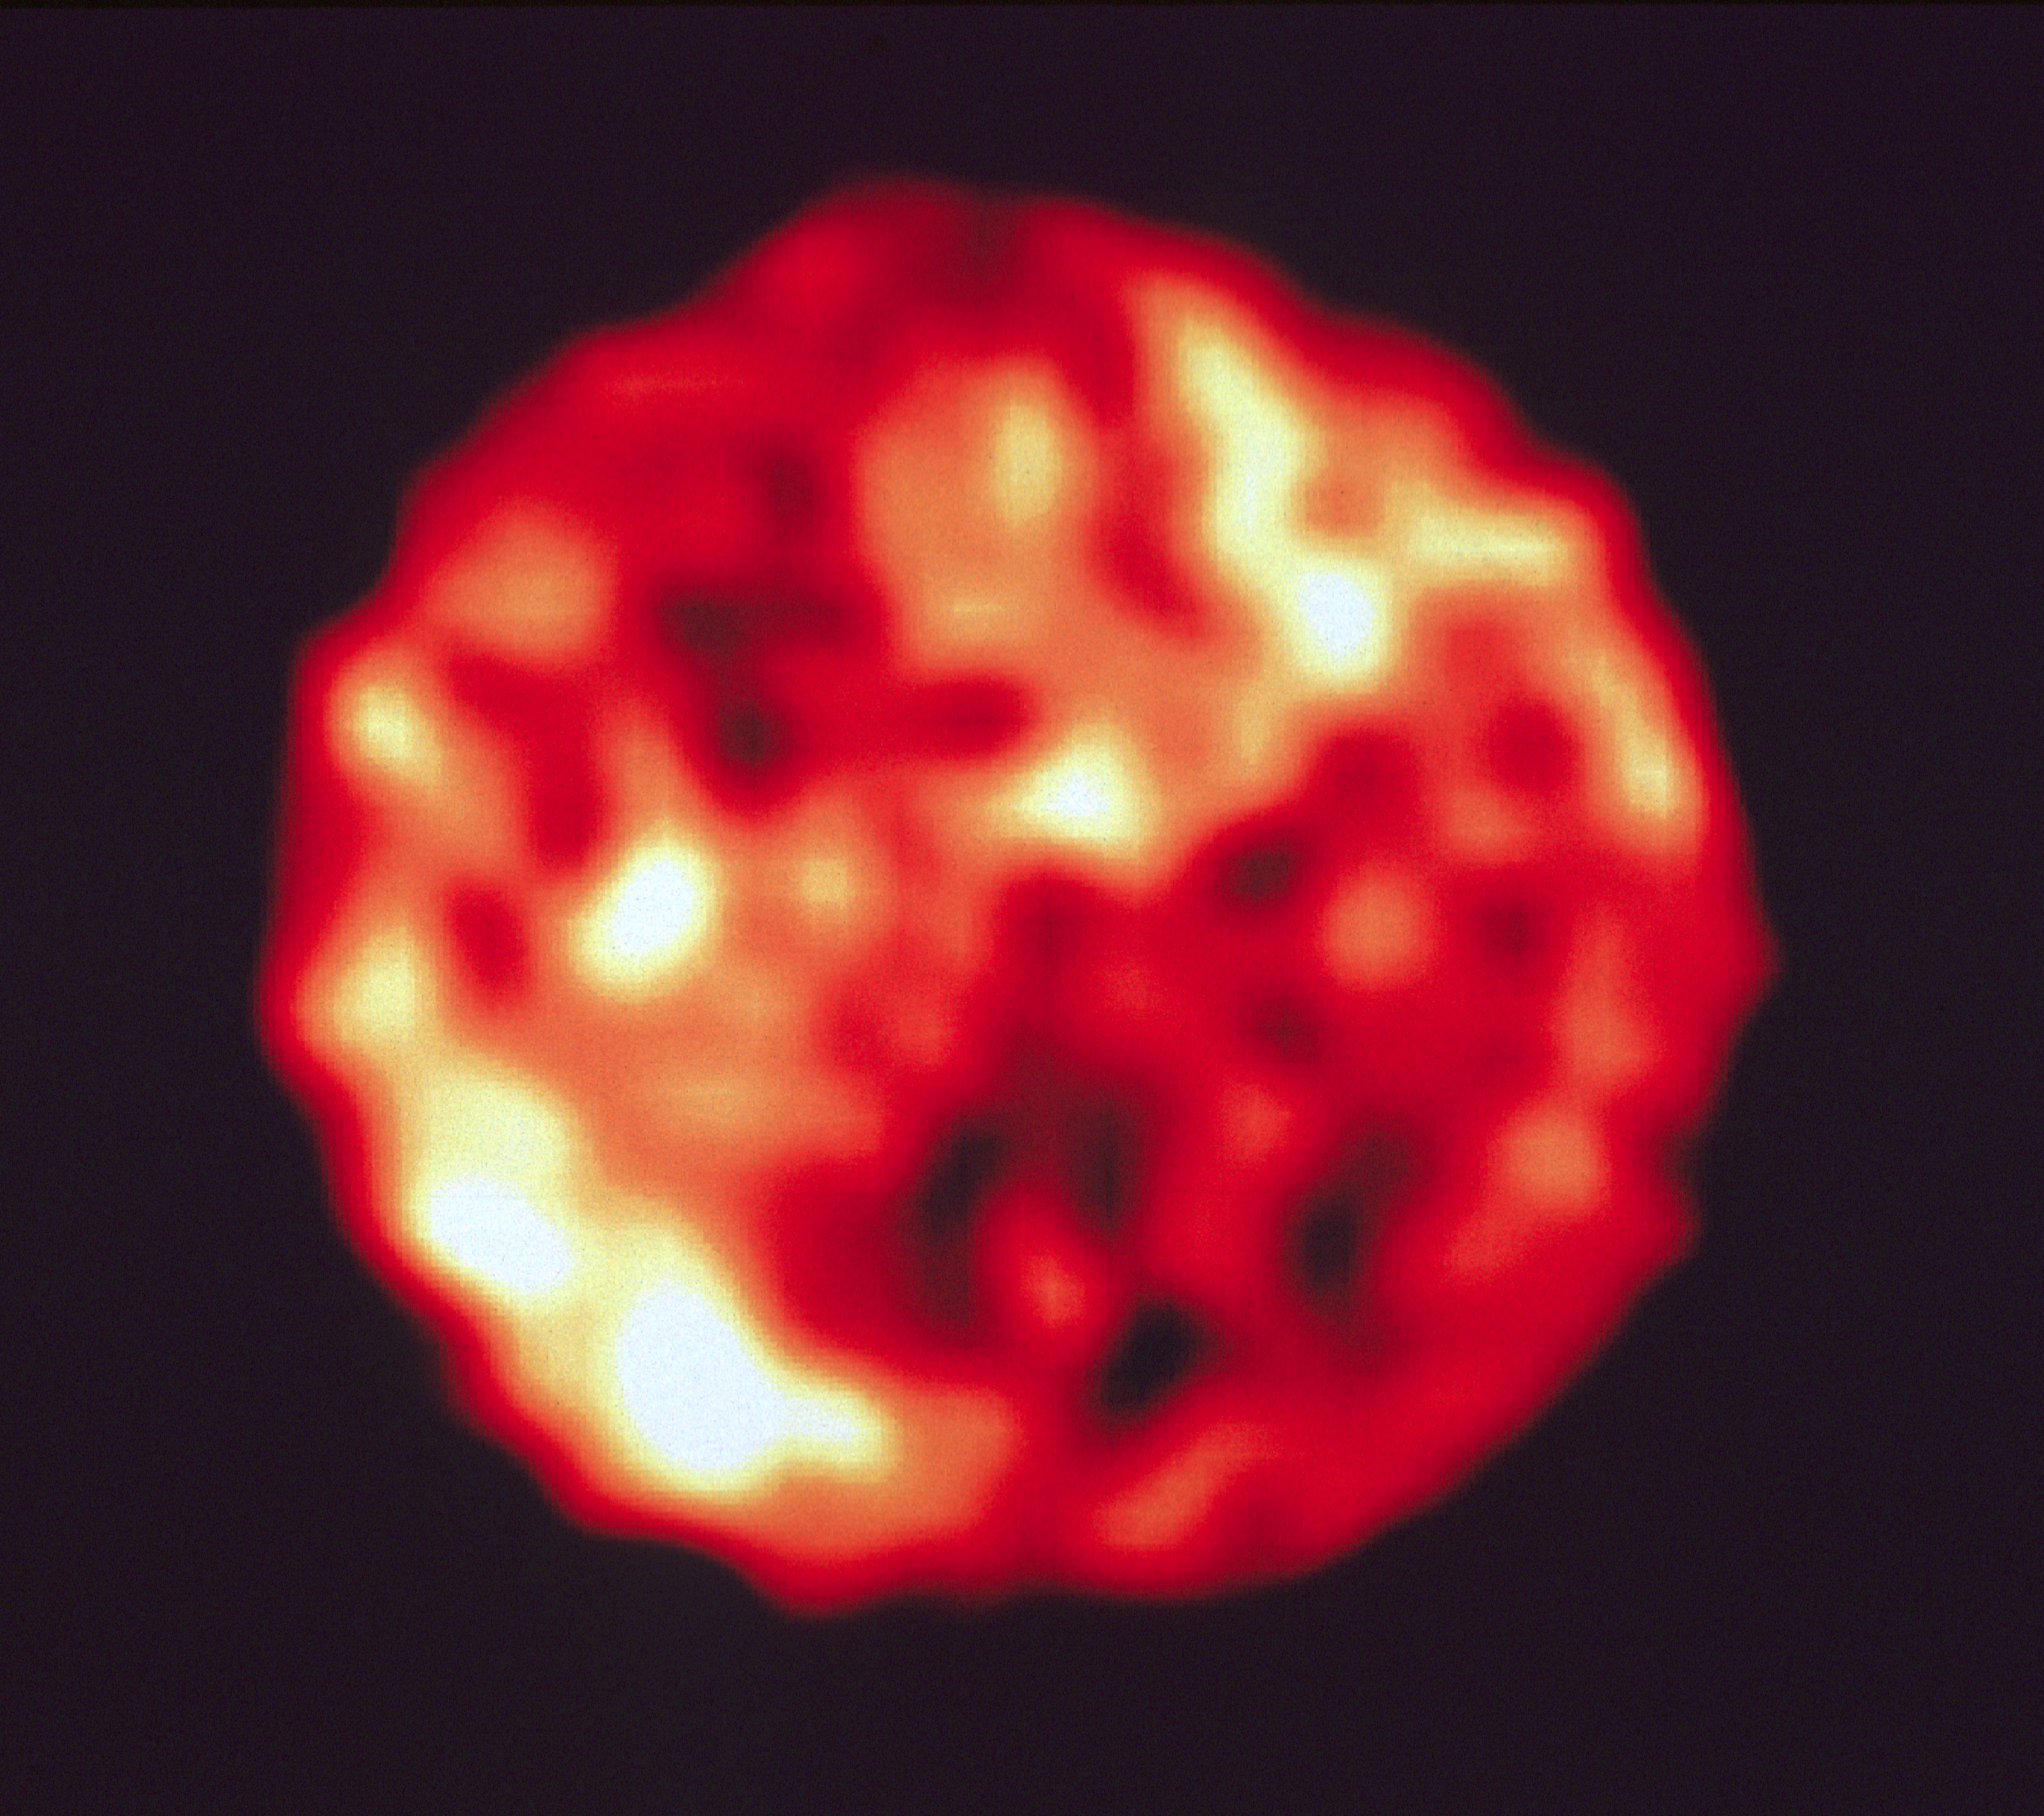

NASA Hubble Space Telescope High Resolution Uv Image of Jupiter's Satellite Io

This is a Hubble Space Telescope image of the geologically active trailing hemisphere of the Jovian moon lo. Theultraviolet light image as taken with the European Space Agency's Faint Object Camera on March 15, 1992, whenlo was 414 million miles from Earth. No larger than Earth's moon, lo is so far away it is at the resolution limit ofground-based telescopes, so surface features cannot be distinguished. HST resolves features as small as 150 miles (about 240 kilometres) across. This level of detail is only surpassed by the Voyager probes which flew within several hundred thousand milesof lo in 1979. lo's surface looks remarkably different in ultraviolet light than it does in visible light. Regions which lookbright in visible light are dark in UV. The most likely explanation is that large areas of lo are covered with a sulfurdioxide frost. Because sulfur dioxide is a strong absorber of UV radiation, sulfur dioxide-rich areas are dark in the UVthough they are bright in visible light.

Technical Information:
lo north is 123 degrees and east 33 degrees counterclockwise from the top of the print. The diameter of the satelliteis 1 .l arc seconds equivalent to a diameter of 2170 miles. Resolution is 22 milliarcsec picture elements (pixels)corresponding to 43 miles per pixel on lo's surface.

Credit: Francesco Paresce (ESA/ STScI)Paola Sartoretti, University of Padova